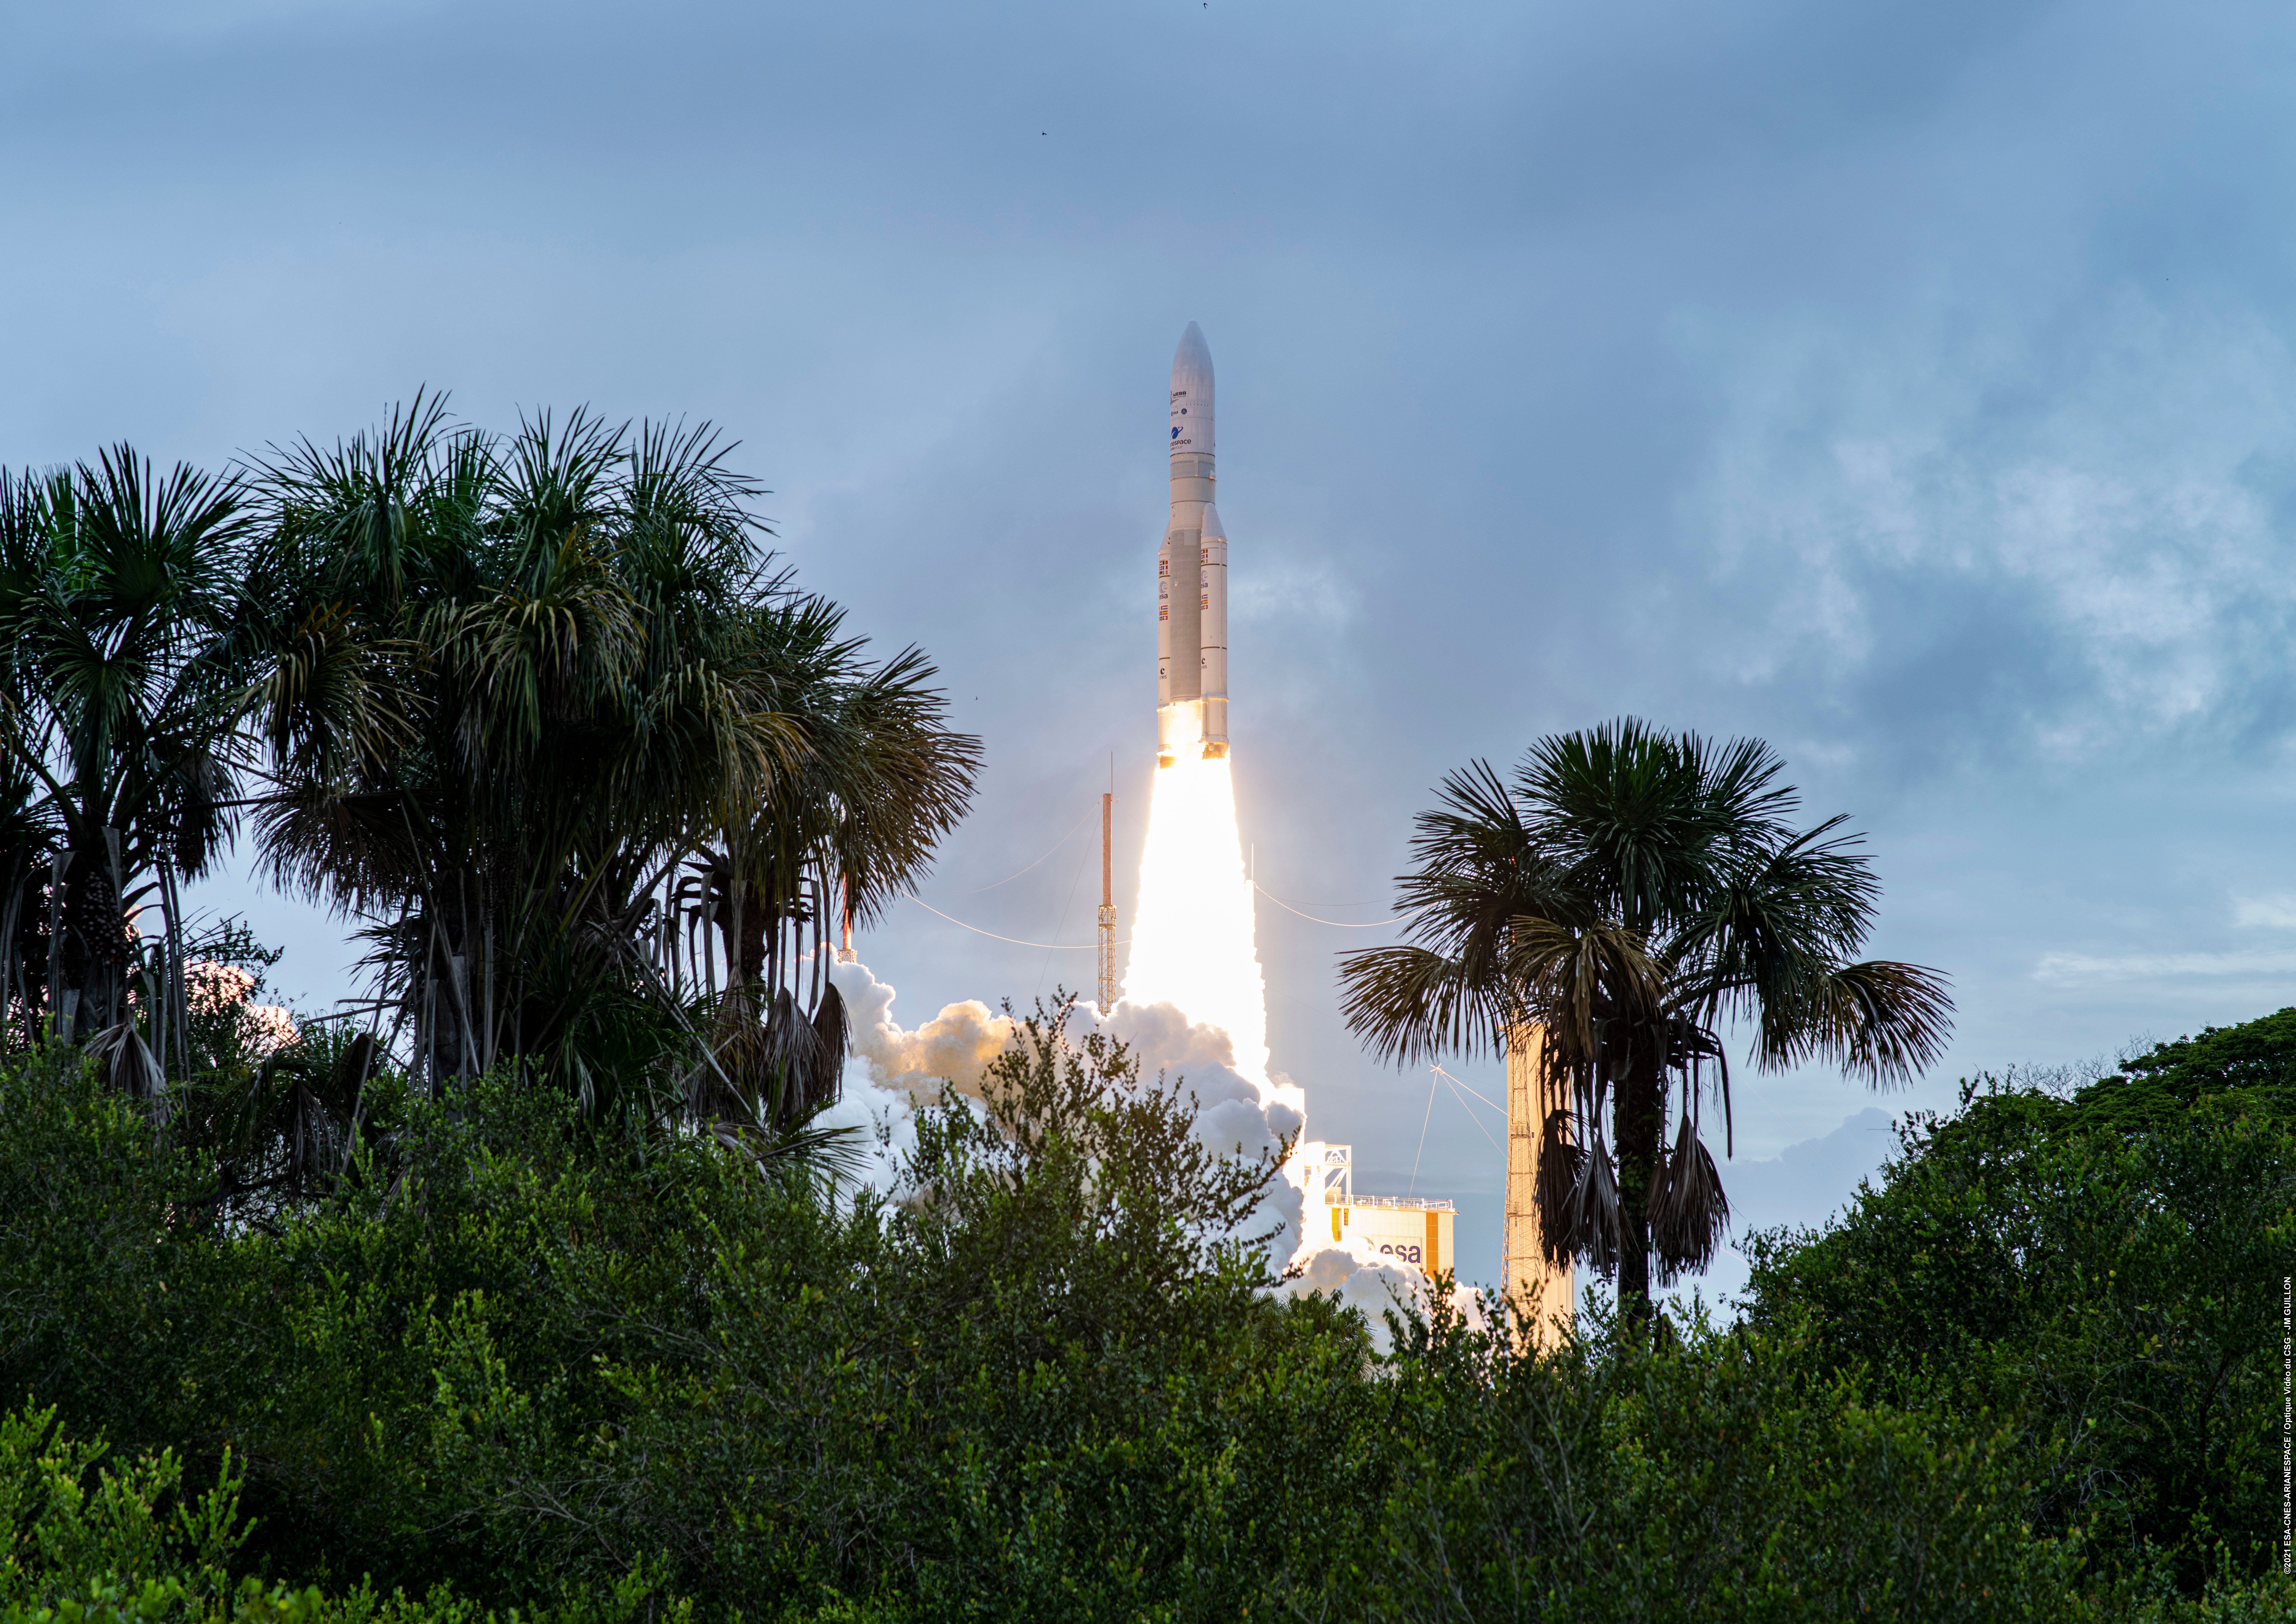

Webb liftoff on Ariane 5

The James Webb Space Telescope lifted off on an Ariane 5 rocket from Europe’s Spaceport in French Guiana, at 13:20 CET on 25 December on its exciting mission to unlock the secrets of the Universe.

Credit: ESA/CNES/Arianespace/Optique Vidéo du CSG - JM Guillon